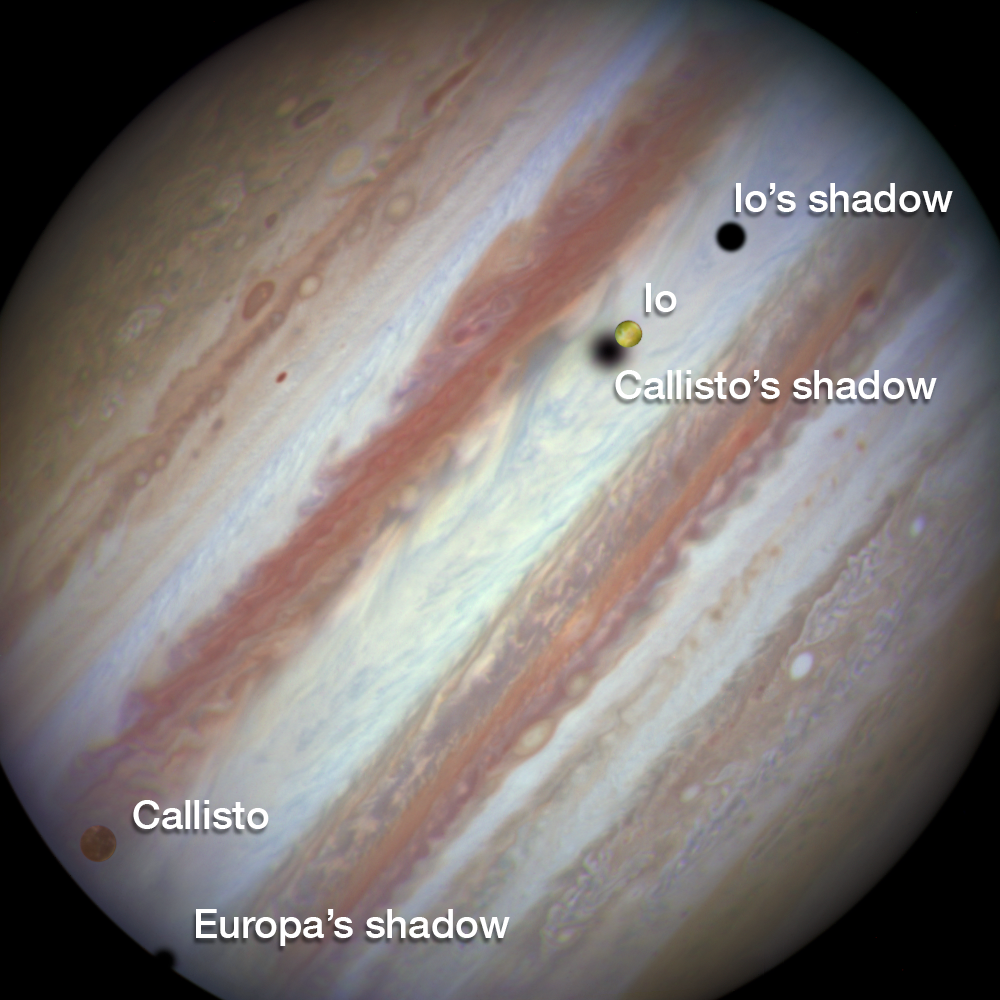

Three moons and their shadows parade across Jupiter — beginning of event, annotated

This new NASA/ESA Hubble Space Telescope image captures a rare occurrence as three of Jupiter’s largest moons parade across the giant gas planet’s banded face.

The image shows the Hubble observation at the beginning of the event. On the left is the moon Callisto and on the right, Io. The shadows from Europa, which cannot be seen in the image, Callisto and Io are strung out from left to right.

The movement of the moons is shown in the video created from Hubble stills.

Credit: NASA, ESA, Hubble Heritage Team